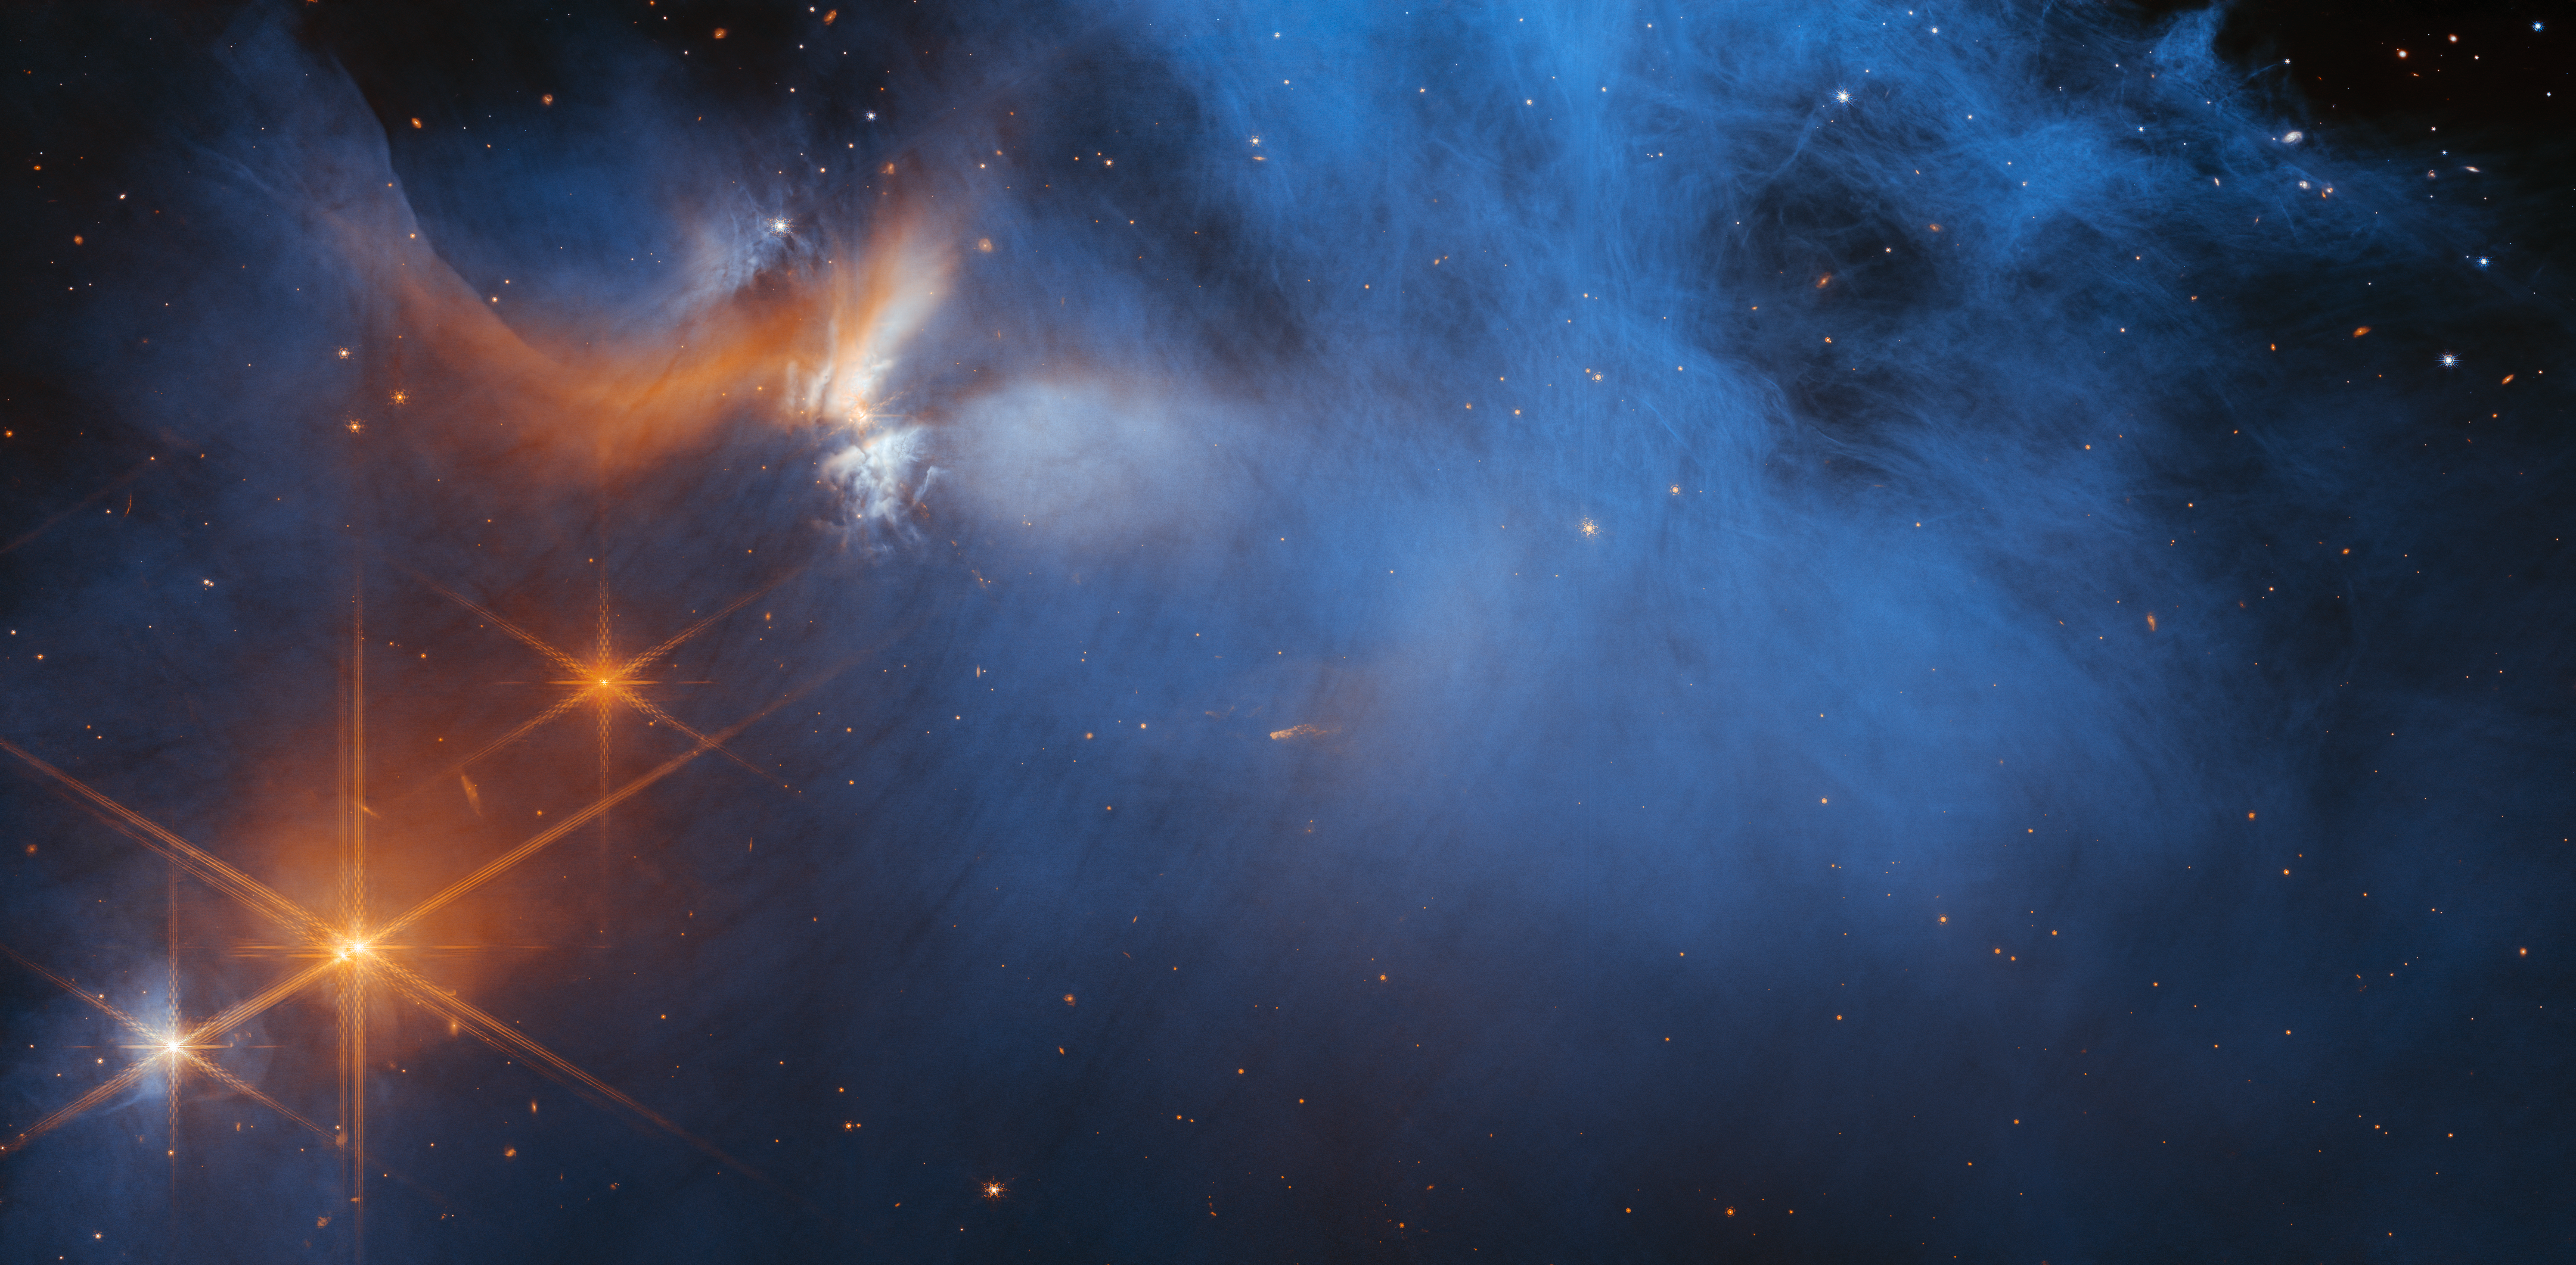

Webb’s View of the Molecular Cloud Chameleon I

This image by the NASA/ESA/CSA James Webb Space Telescope’s Near-InfraRed Camera (NIRCam) features the central region of the Chameleon I dark molecular cloud, which resides 630 light years away. The cold, wispy cloud material (blue, centre) is illuminated in the infrared by the glow of the young, outflowing protostar Ced 110 IRS 4 (orange, upper left). The light from numerous background stars, seen as orange dots behind the cloud, can be used to detect ices in the cloud, which absorb the starlight passing through them.

An international team of astronomers has reported the discovery of diverse ices in the darkest, coldest regions of a molecular cloud measured to date by studying this region. This result allows astronomers to examine the simple icy molecules that will be incorporated into future exoplanets, while opening a new window on the origin of more complex molecules that are the first step in the creation of the building blocks of life.

Credit: NASA, ESA, CSA, and M. Zamani (ESA/Webb); Science: F. Sun (Steward Observatory), Z. Smith (Open University), and the Ice Age ERS Team.